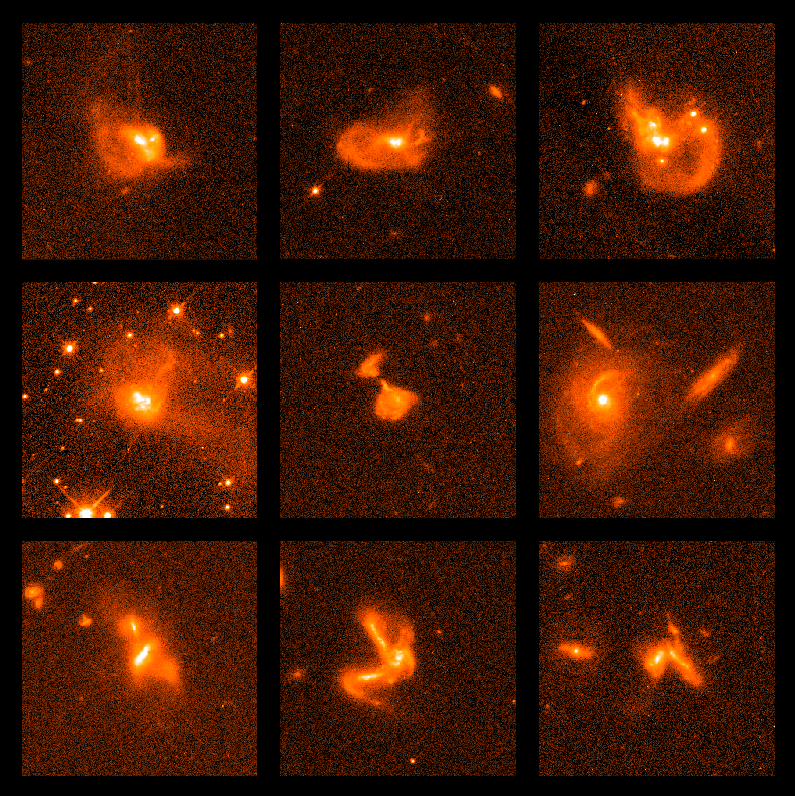

Multiple galaxy collisions

Astronomers have interpreted the oddly shaped objects in these NASA/ESA Hubble Space Telescope snapshots as strong visual evidence for multiple galaxies crashing into each other. These smashups create a tangled clump of matter and trigger a burst of new stars.

Credit: NASA/ESA, Kirk Borne (Raytheon and NASA/ESA Goddard Space Flight Center, Greenbelt, Md.), Luis Colina (Instituto de Fisica de Cantabria, Spain), and Howard Bushouse and Ray Lucas ( Space Telescope Science Institute, Baltimore, Md.)